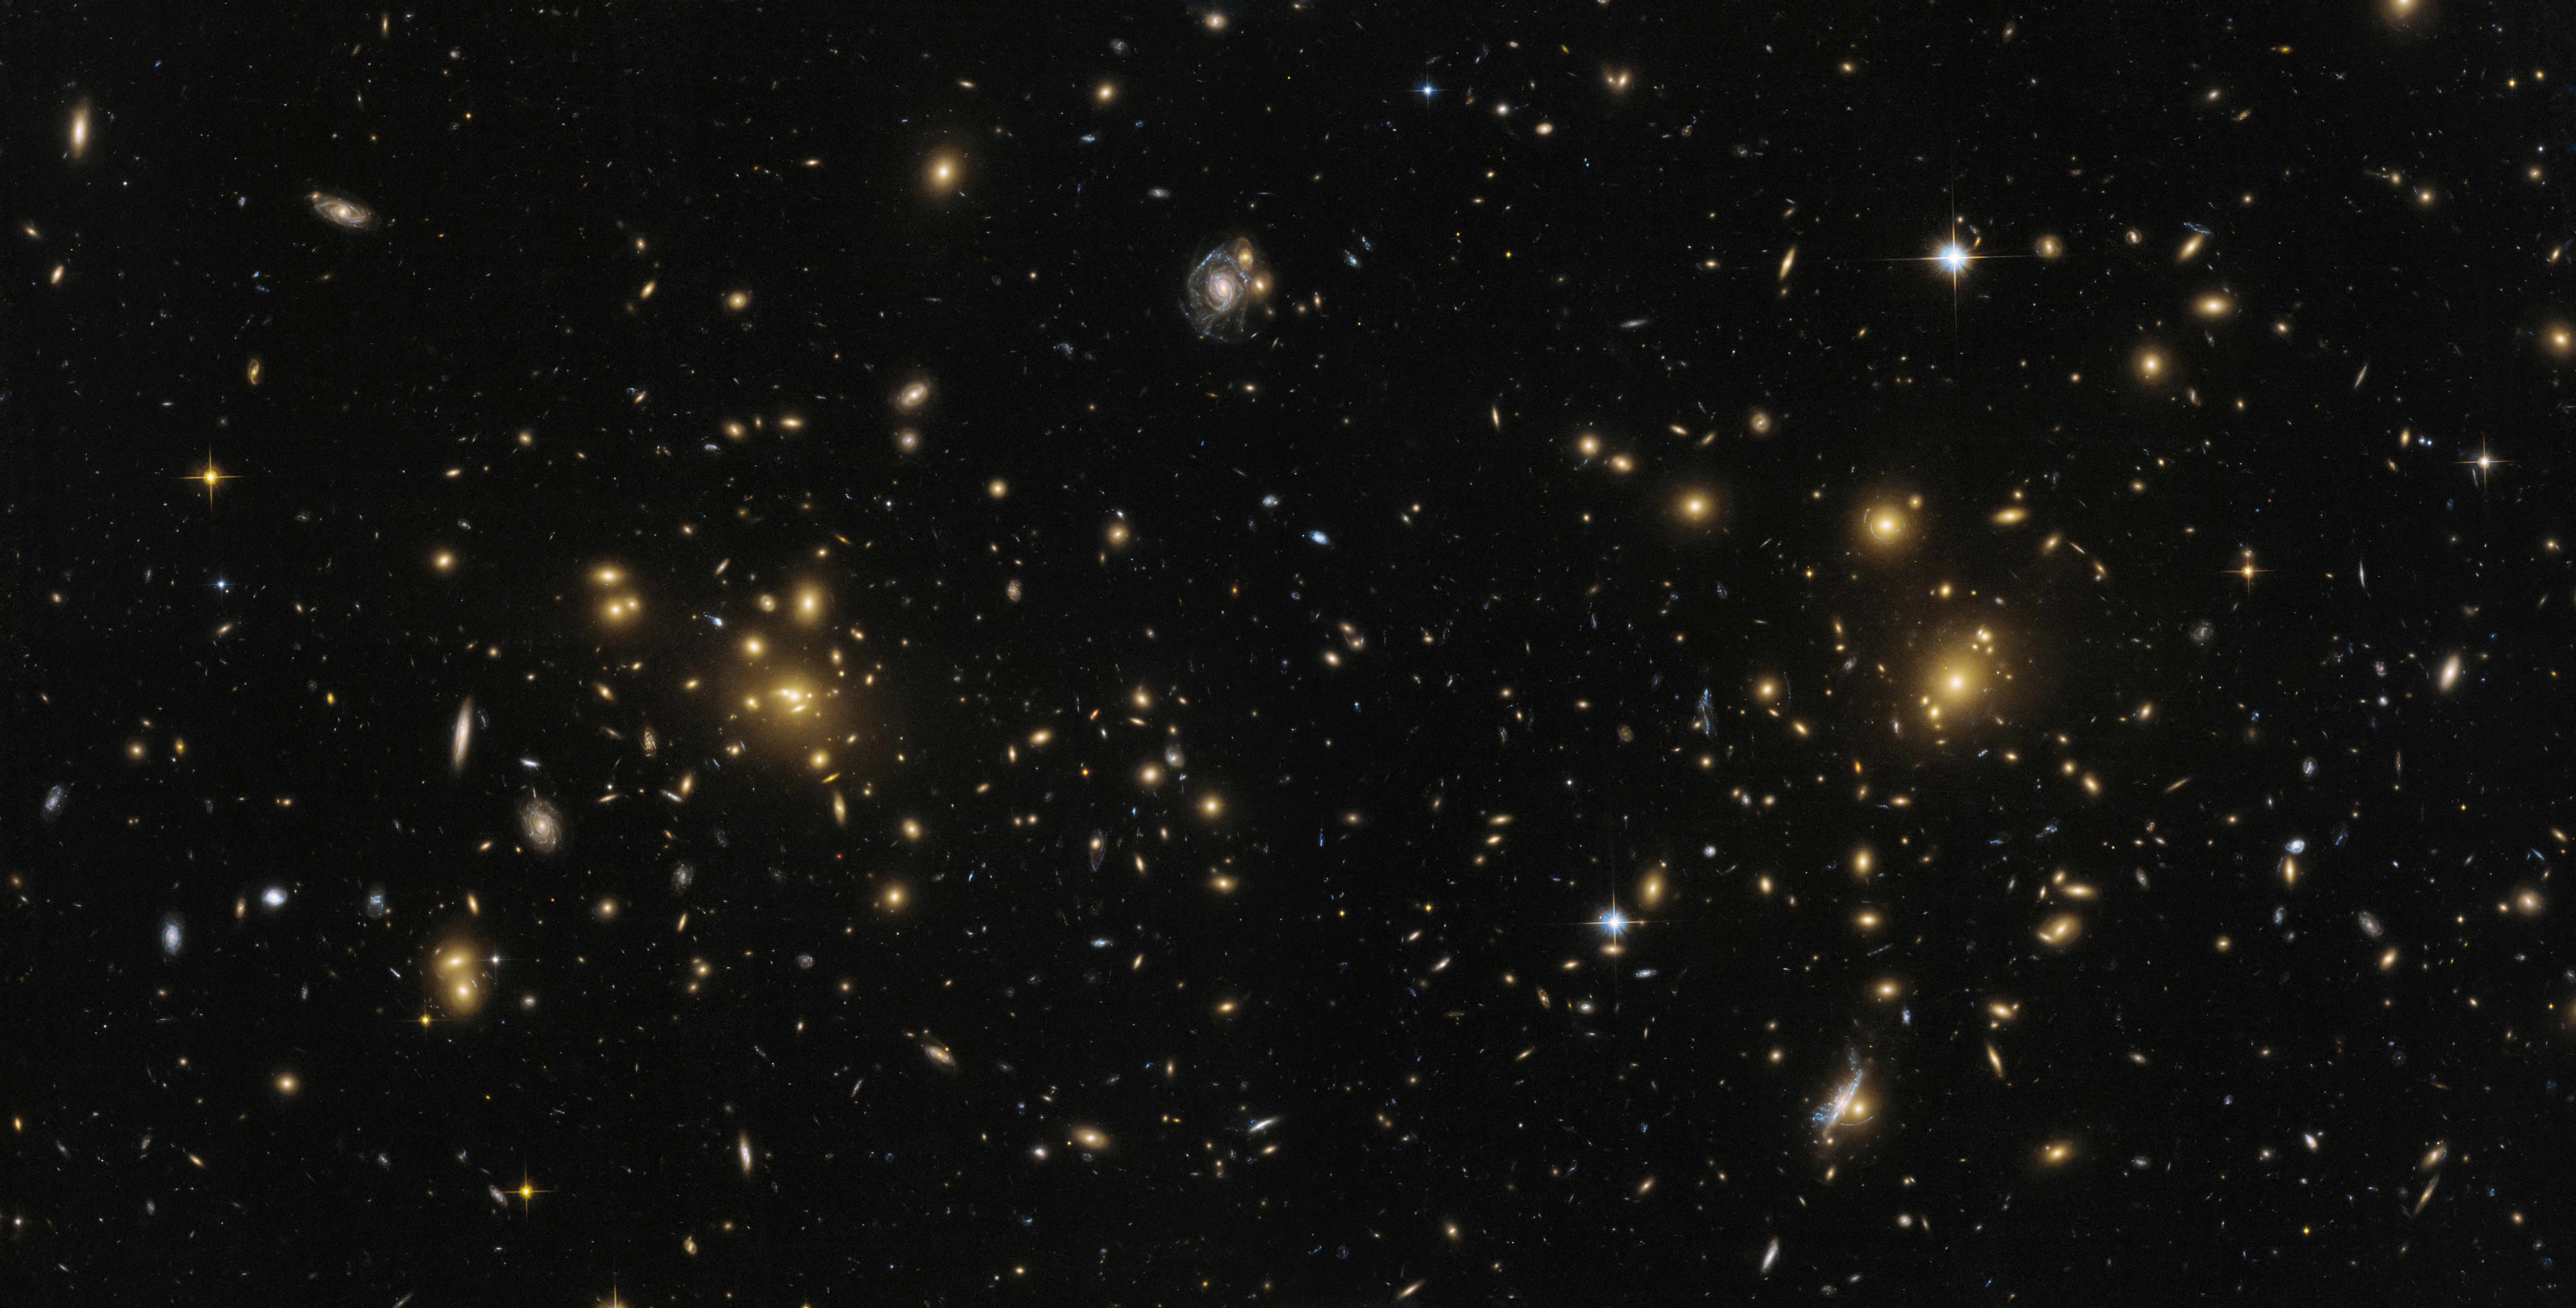

Northern part of Abell 1758

This image from the NASA/ESA Hubble Space Telescope shows the northern part of the galaxy cluster Abell 1758, A1758N. The cluster is approximately 3.2 billion light-years from Earth and is part of a larger structure containing two cluster sitting some 2.4 million light-years apart.

But A1758N itself is further split into two sub-sections, known as East (A1758NE) and West (A1758NW). There appear to be disturbances within both of these sub-sections — strong evidence that they are the result of smaller clusters colliding and merging.

Credit: ESA/Hubble, NASA